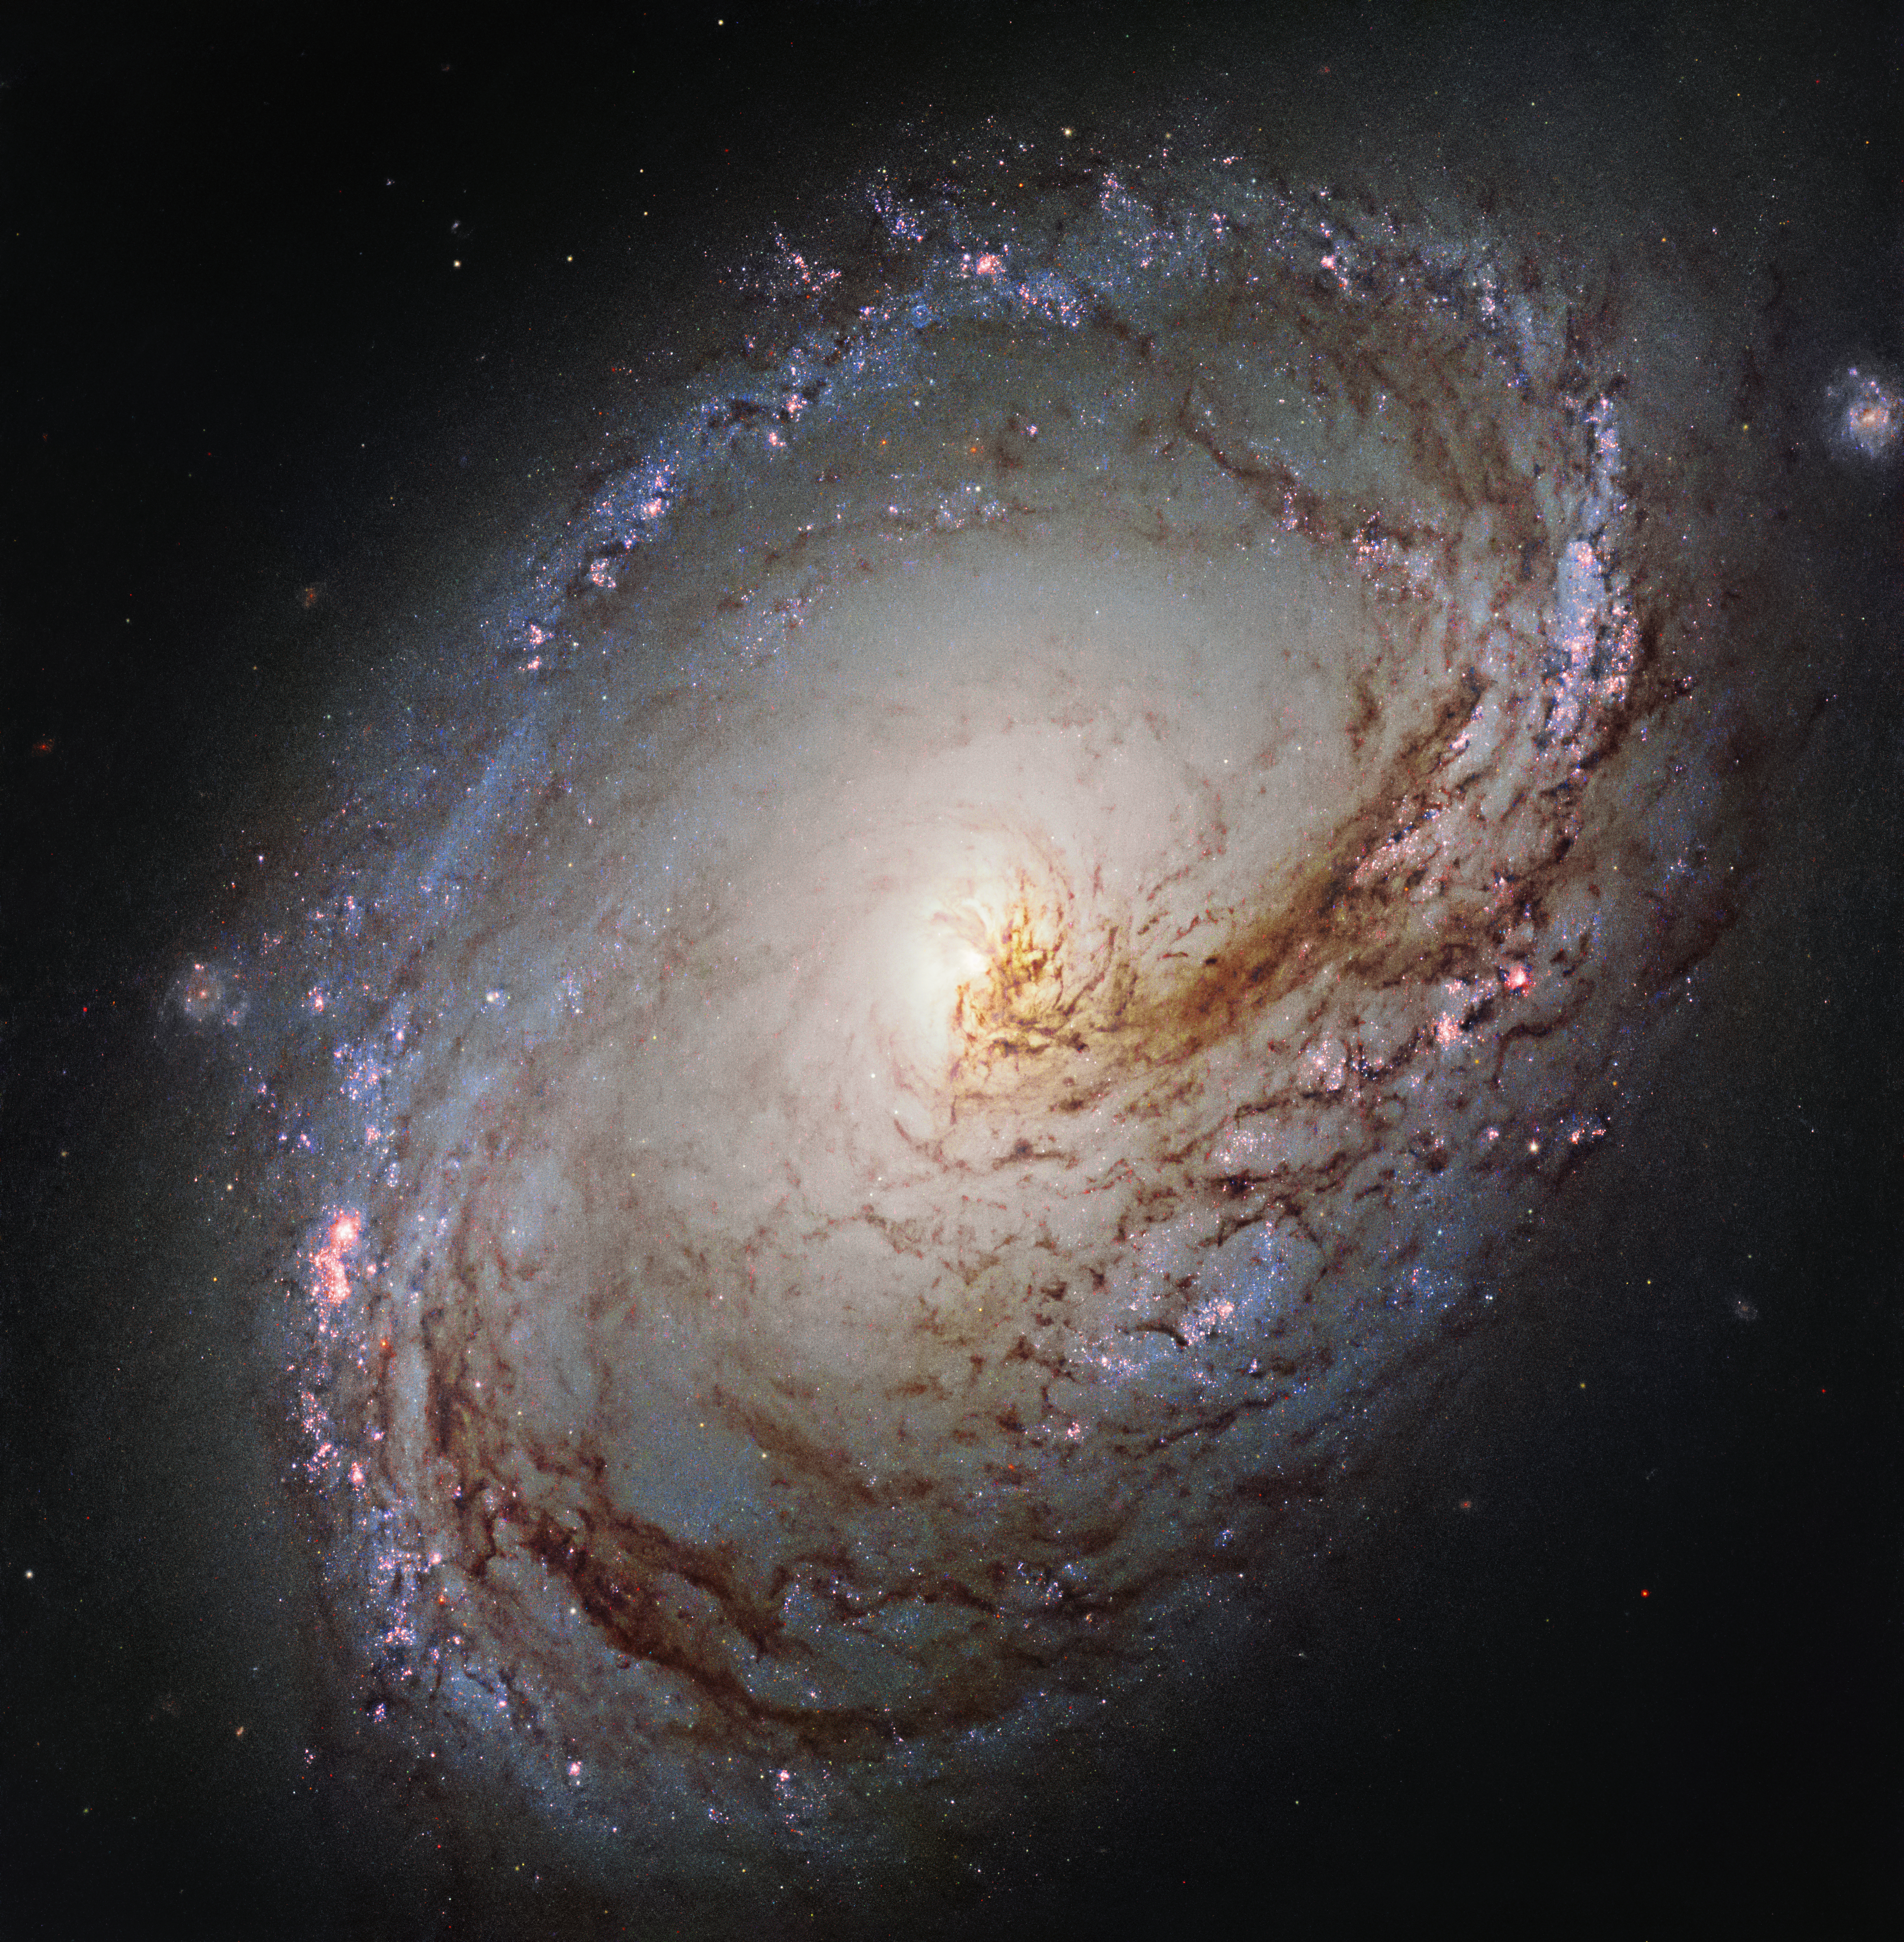

A galactic maelstrom

This new NASA/ESA Hubble Space Telescope shows Messier 96, a spiral galaxy just over 35 million light-years away in the constellation of Leo (The Lion). It is of about the same mass and size as the Milky Way. It was first discovered by astronomer Pierre Méchain in 1781, and added to Charles Messier’s famous catalogue of astronomical objects just four days later.

The galaxy resembles a giant maelstrom of glowing gas, rippled with dark dust that swirls inwards towards the nucleus. Messier 96 is a very asymmetric galaxy; its dust and gas is unevenly spread throughout its weak spiral arms, and its core is not exactly at the galactic centre. Its arms are also asymmetrical, thought to have been influenced by the gravitational pull of other galaxies within the same group as Messier 96.

This group, named the M96 Group, also includes the bright galaxies Messier 105 and Messier 95, as well as a number of smaller and fainter galaxies. It is the nearest group containing both bright spirals and a bright elliptical galaxy (Messier 105).

Credit: ESA/Hubble & NASA and the LEGUS Team Acknowledgement: R. Gendler